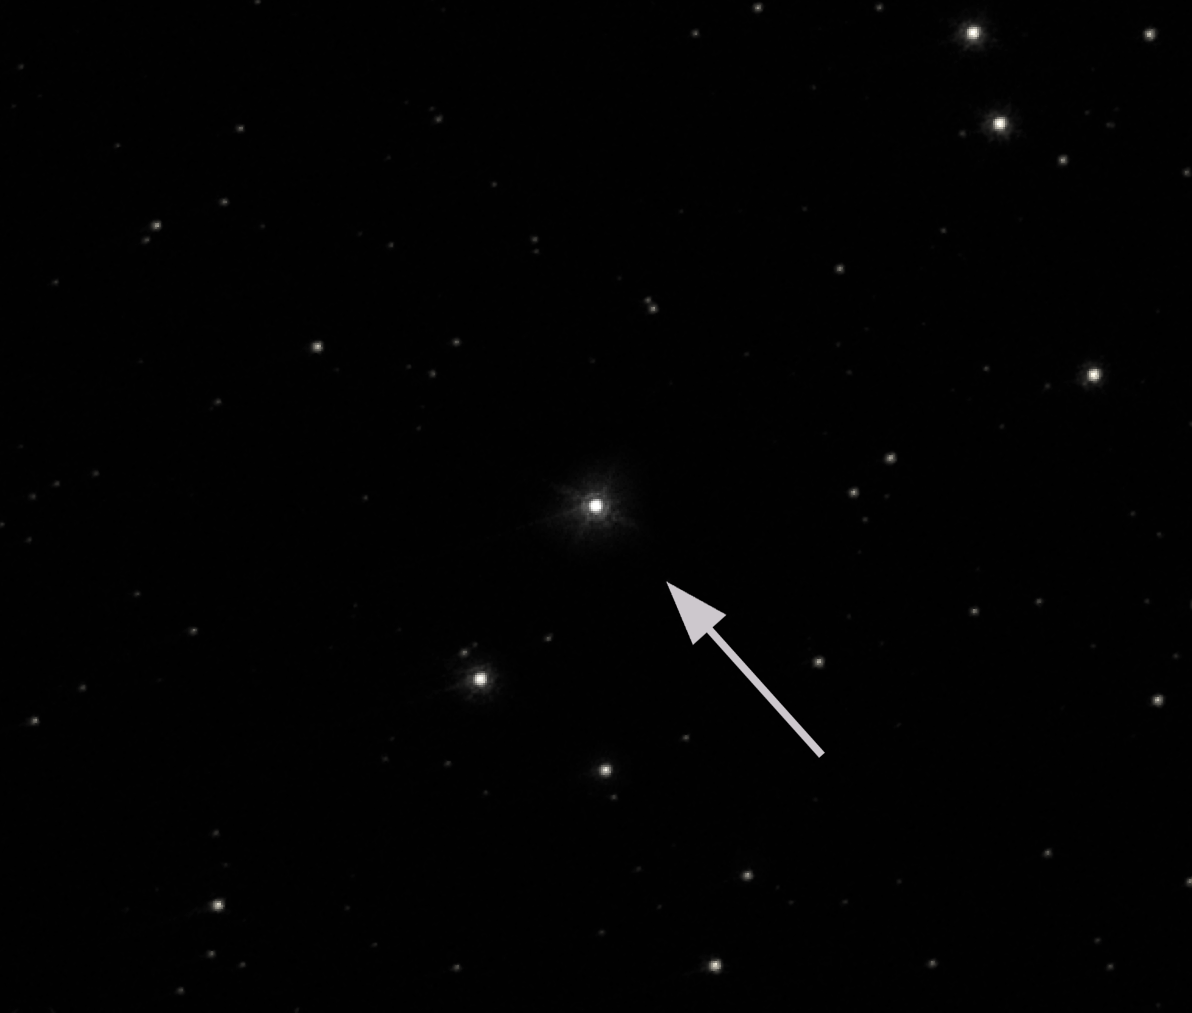

Black-hole system GRO J1655-40 in Scorpius

NASA/ESA Hubble Space Telescope image shows the Year 2001 observation of the black hole system GRO J1655-40 in the constellation of Scorpius. Hubble's high resolution has allowed astronomers to measure the motion of this black-hole system across the sky using this image and an image taken in 1996. Scientists combined the Hubble data with those obtained from ground-based telescopes and found that the black hole is moving through space with a velocity of 400 000 kilometres per hour. This has provided possibly the best evidence yet that stellar-mass black holes are made in supernova explosions. The 720-second exposure was taken through a red filter.

Credit: European Space Agency, NASA and Felix Mirabel (the French Atomic Energy Commission & the Institute for Astronomy and Space Physics/Conicet of Argentina)